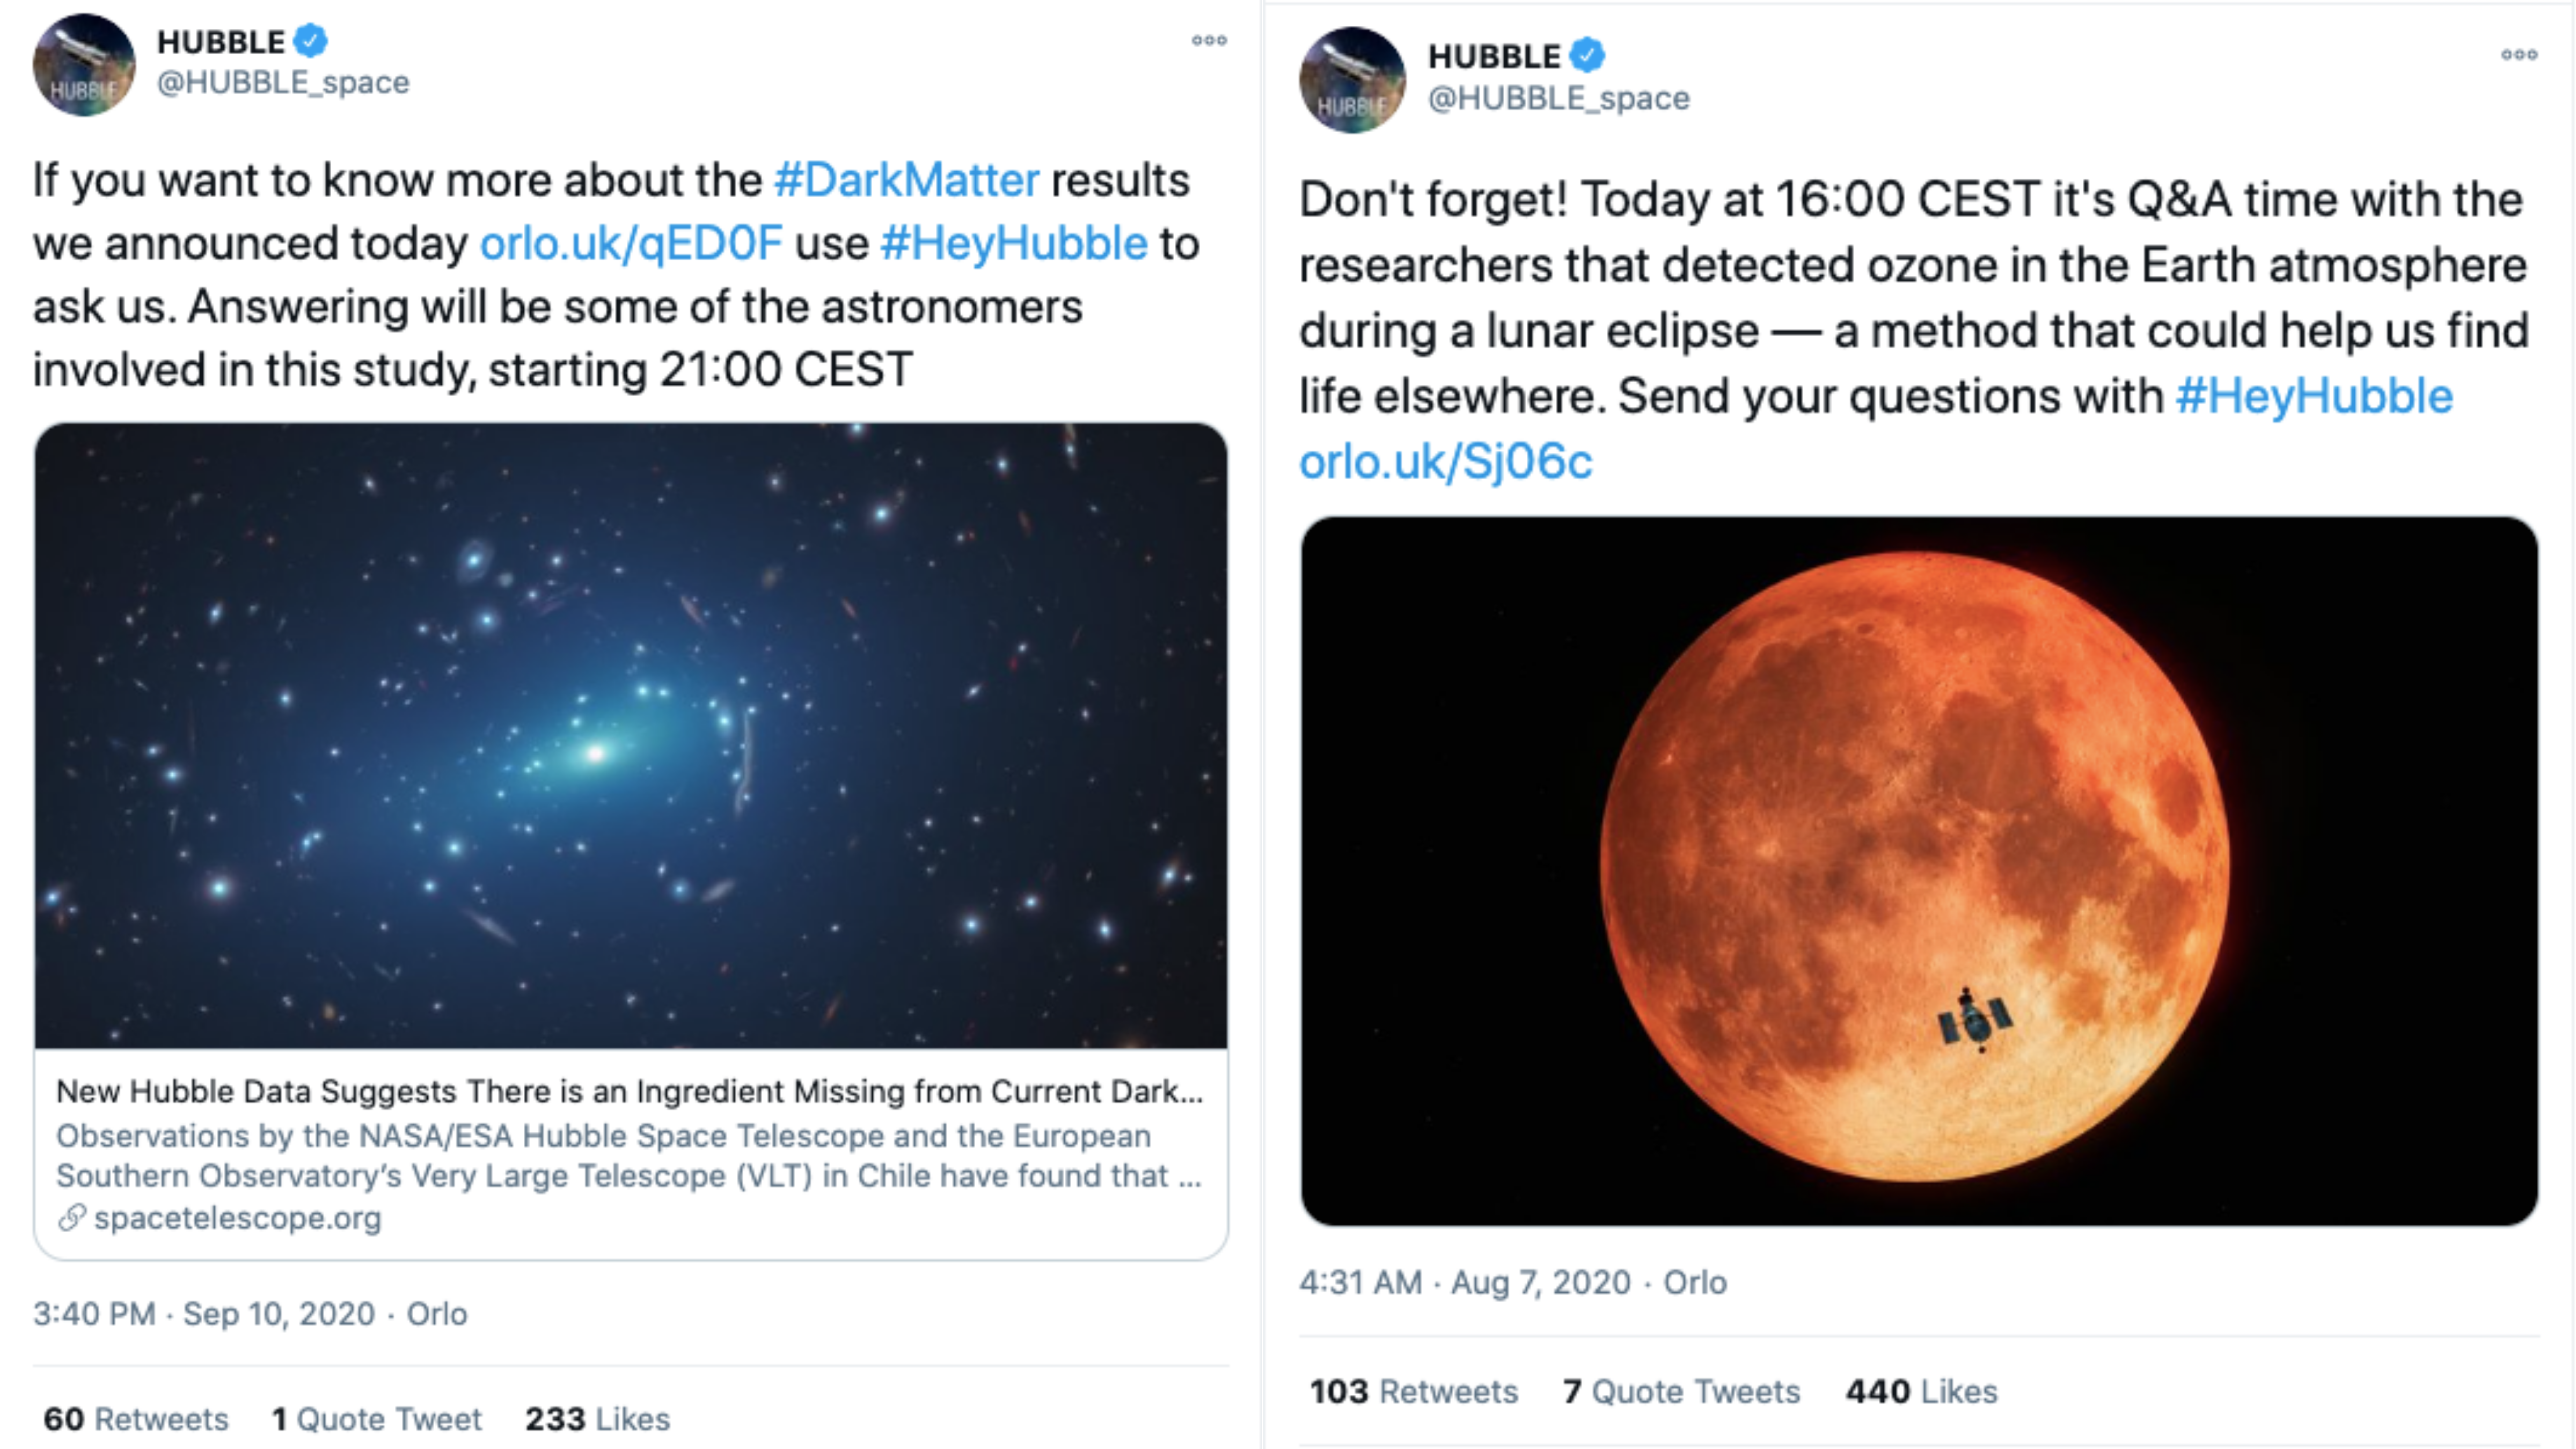

ESA/Hubble Tweets inviting people to the Twitter Q&A’s

ESA/Hubble Tweets inviting people to the Twitter Q&A’s.

Credit: ESA/Hubble